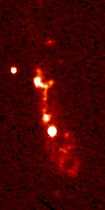

Radio galaxy 3C368

3C368. One of the best studied radio galaxies, this image is composed of a very smooth cigar-shaped emission region closely aligned with the radio axis, upon which is superimposed a string of bright knots that might be stars or dust. This suggests that a jet of high speed gas, presumably ejected from a black hole at the core of the galaxy, might be triggering star formation along its path.

Credit: M. Longair (Cambridge University, England), NASA/ESA, and NRAO